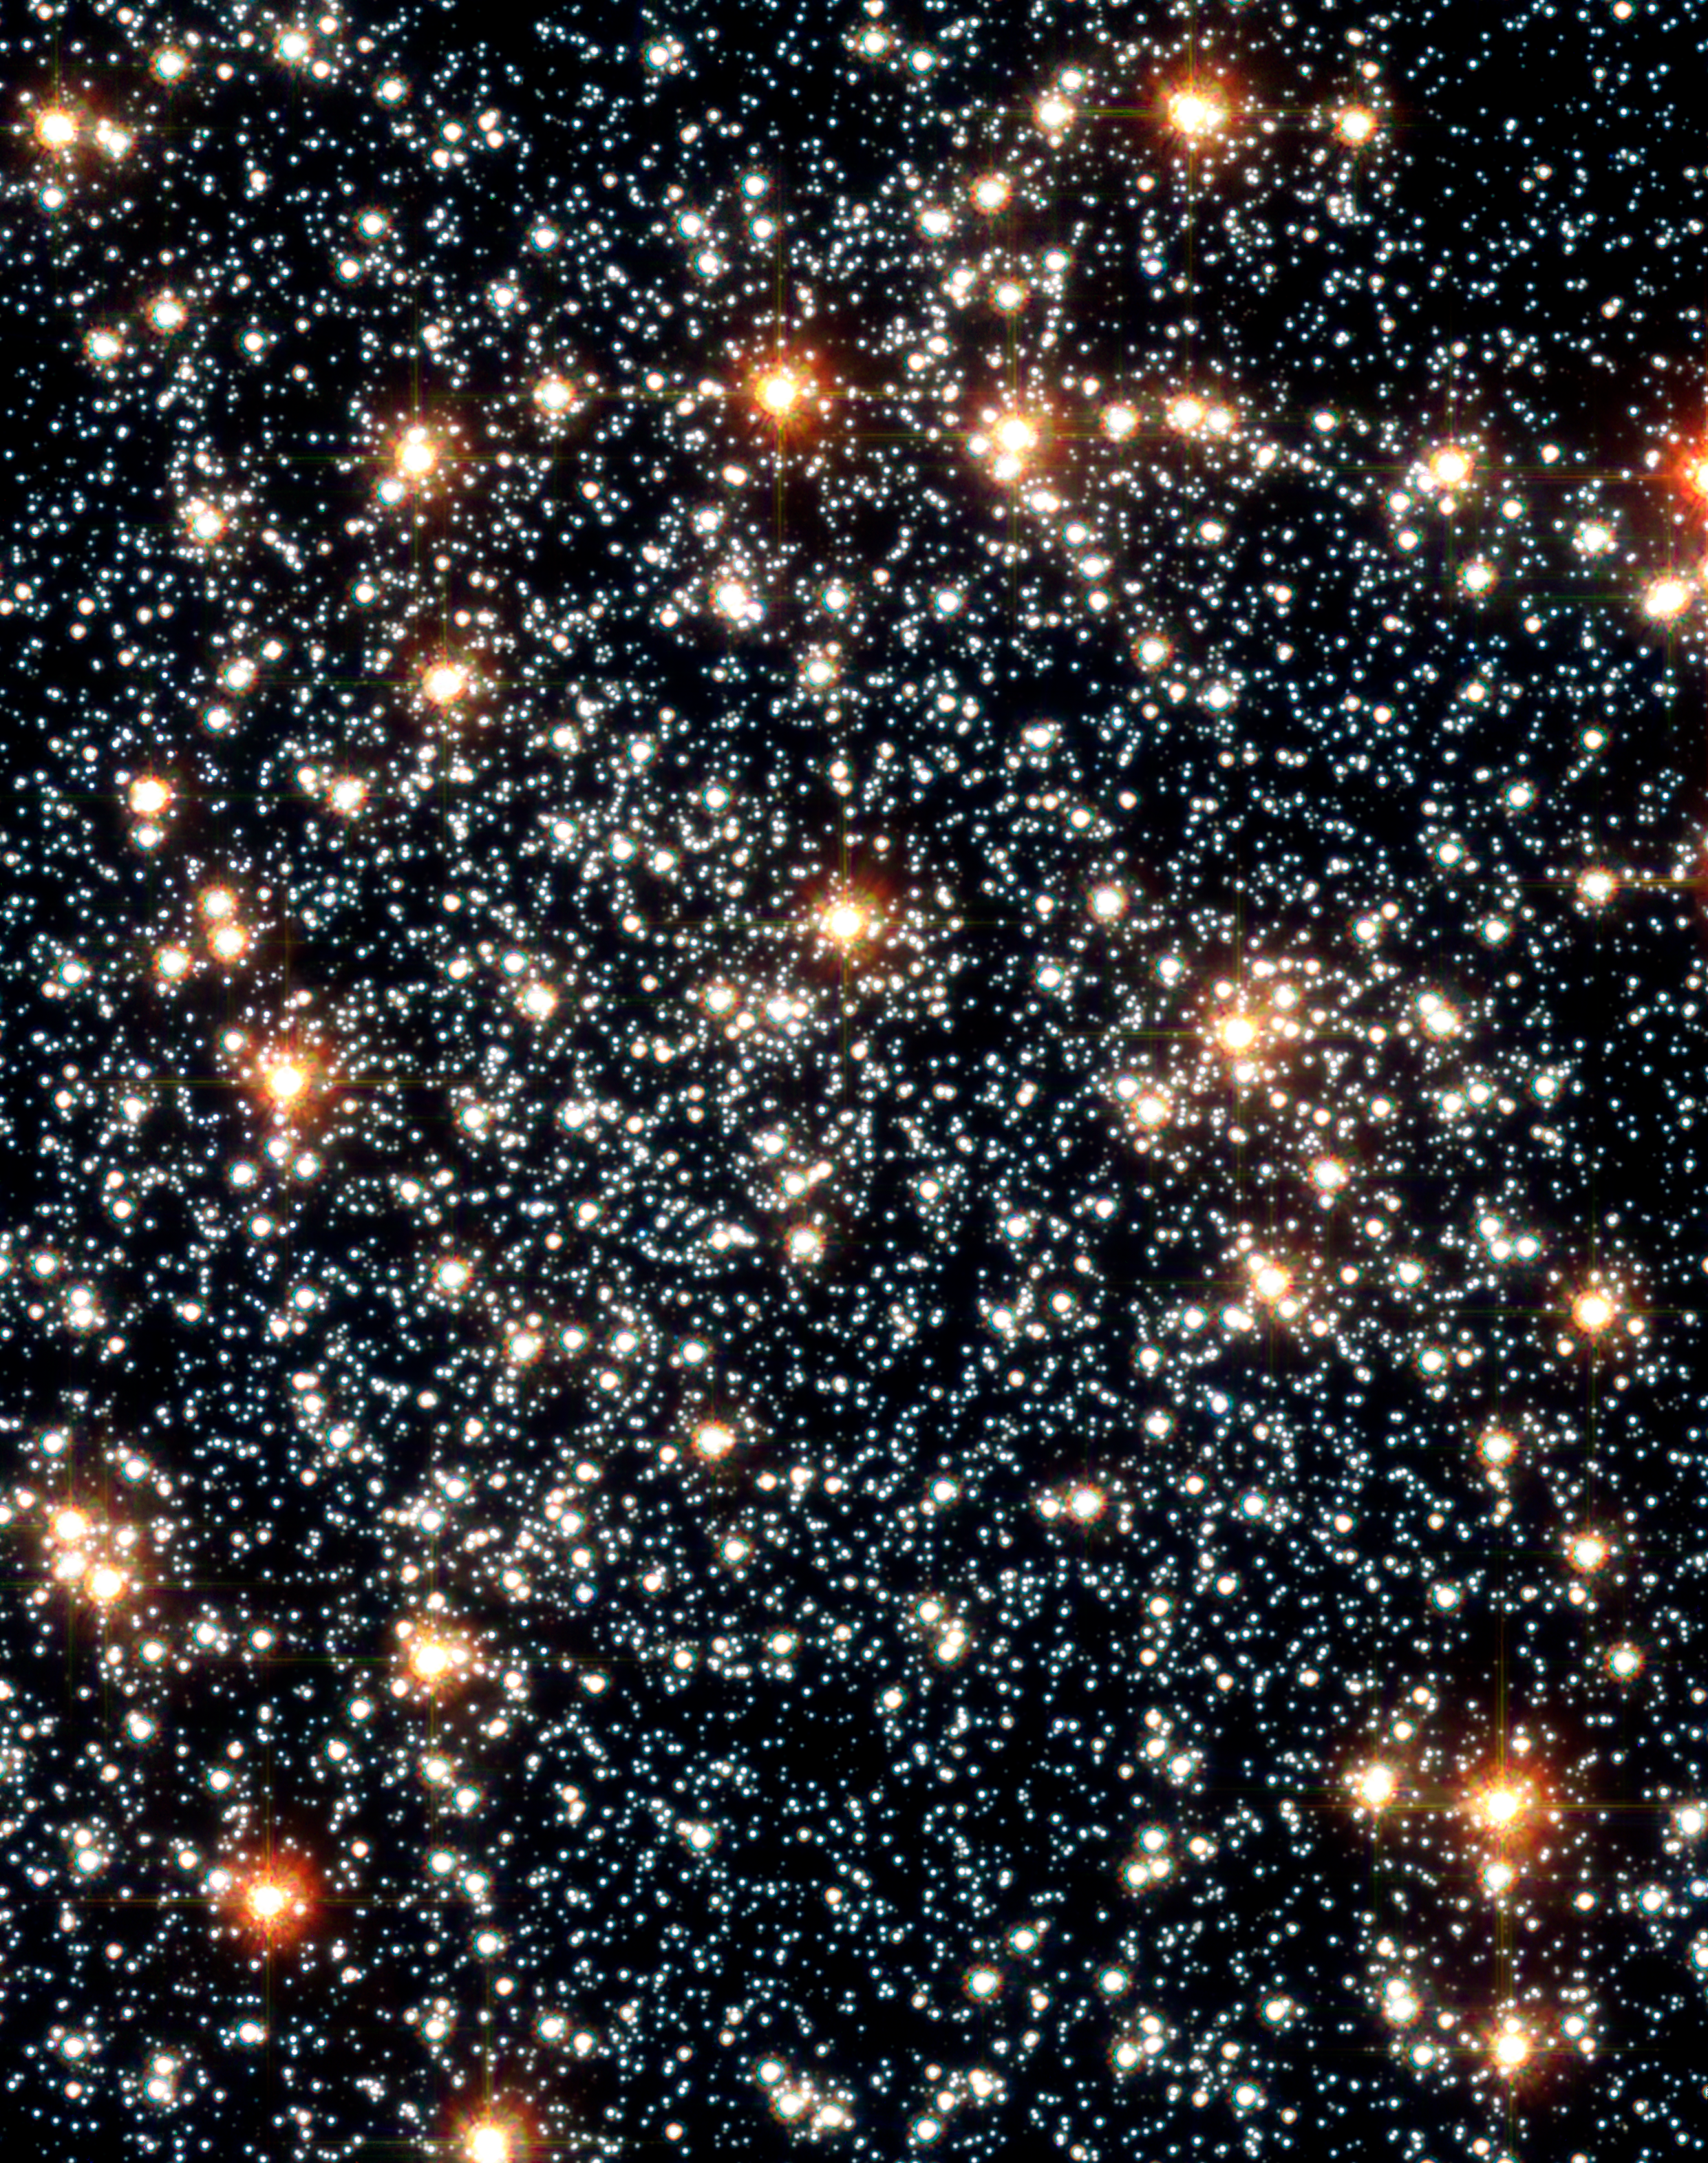

Stellar sorting in globular cluster 47 Tucanae

A seven year study with the NASA/ESA Hubble Space Telescope has provided astronomers with the best observational evidence yet that globular clusters sort out stars according to their mass, governed by a gravitational billiard ball game between stars. Heavier stars slow down and sink to the cluster's core, while lighter stars pick up speed and move across the cluster to its periphery. This process, called "mass segregation", has long been suspected for globular star clusters, but has never before been directly seen in action.

This image shows the core of 47 Tucanae. Multiple photos of this region allowed astronomers to track the "beehive swarm" motion of stars. Precise velocities were obtained for nearly 15,000 stars in this cluster. This image was taken with Hubble's Advanced Camera for Surveys.

Credit: NASA, ESA, and G. Meylan (École Polytechnique Fédérale de Lausanne)